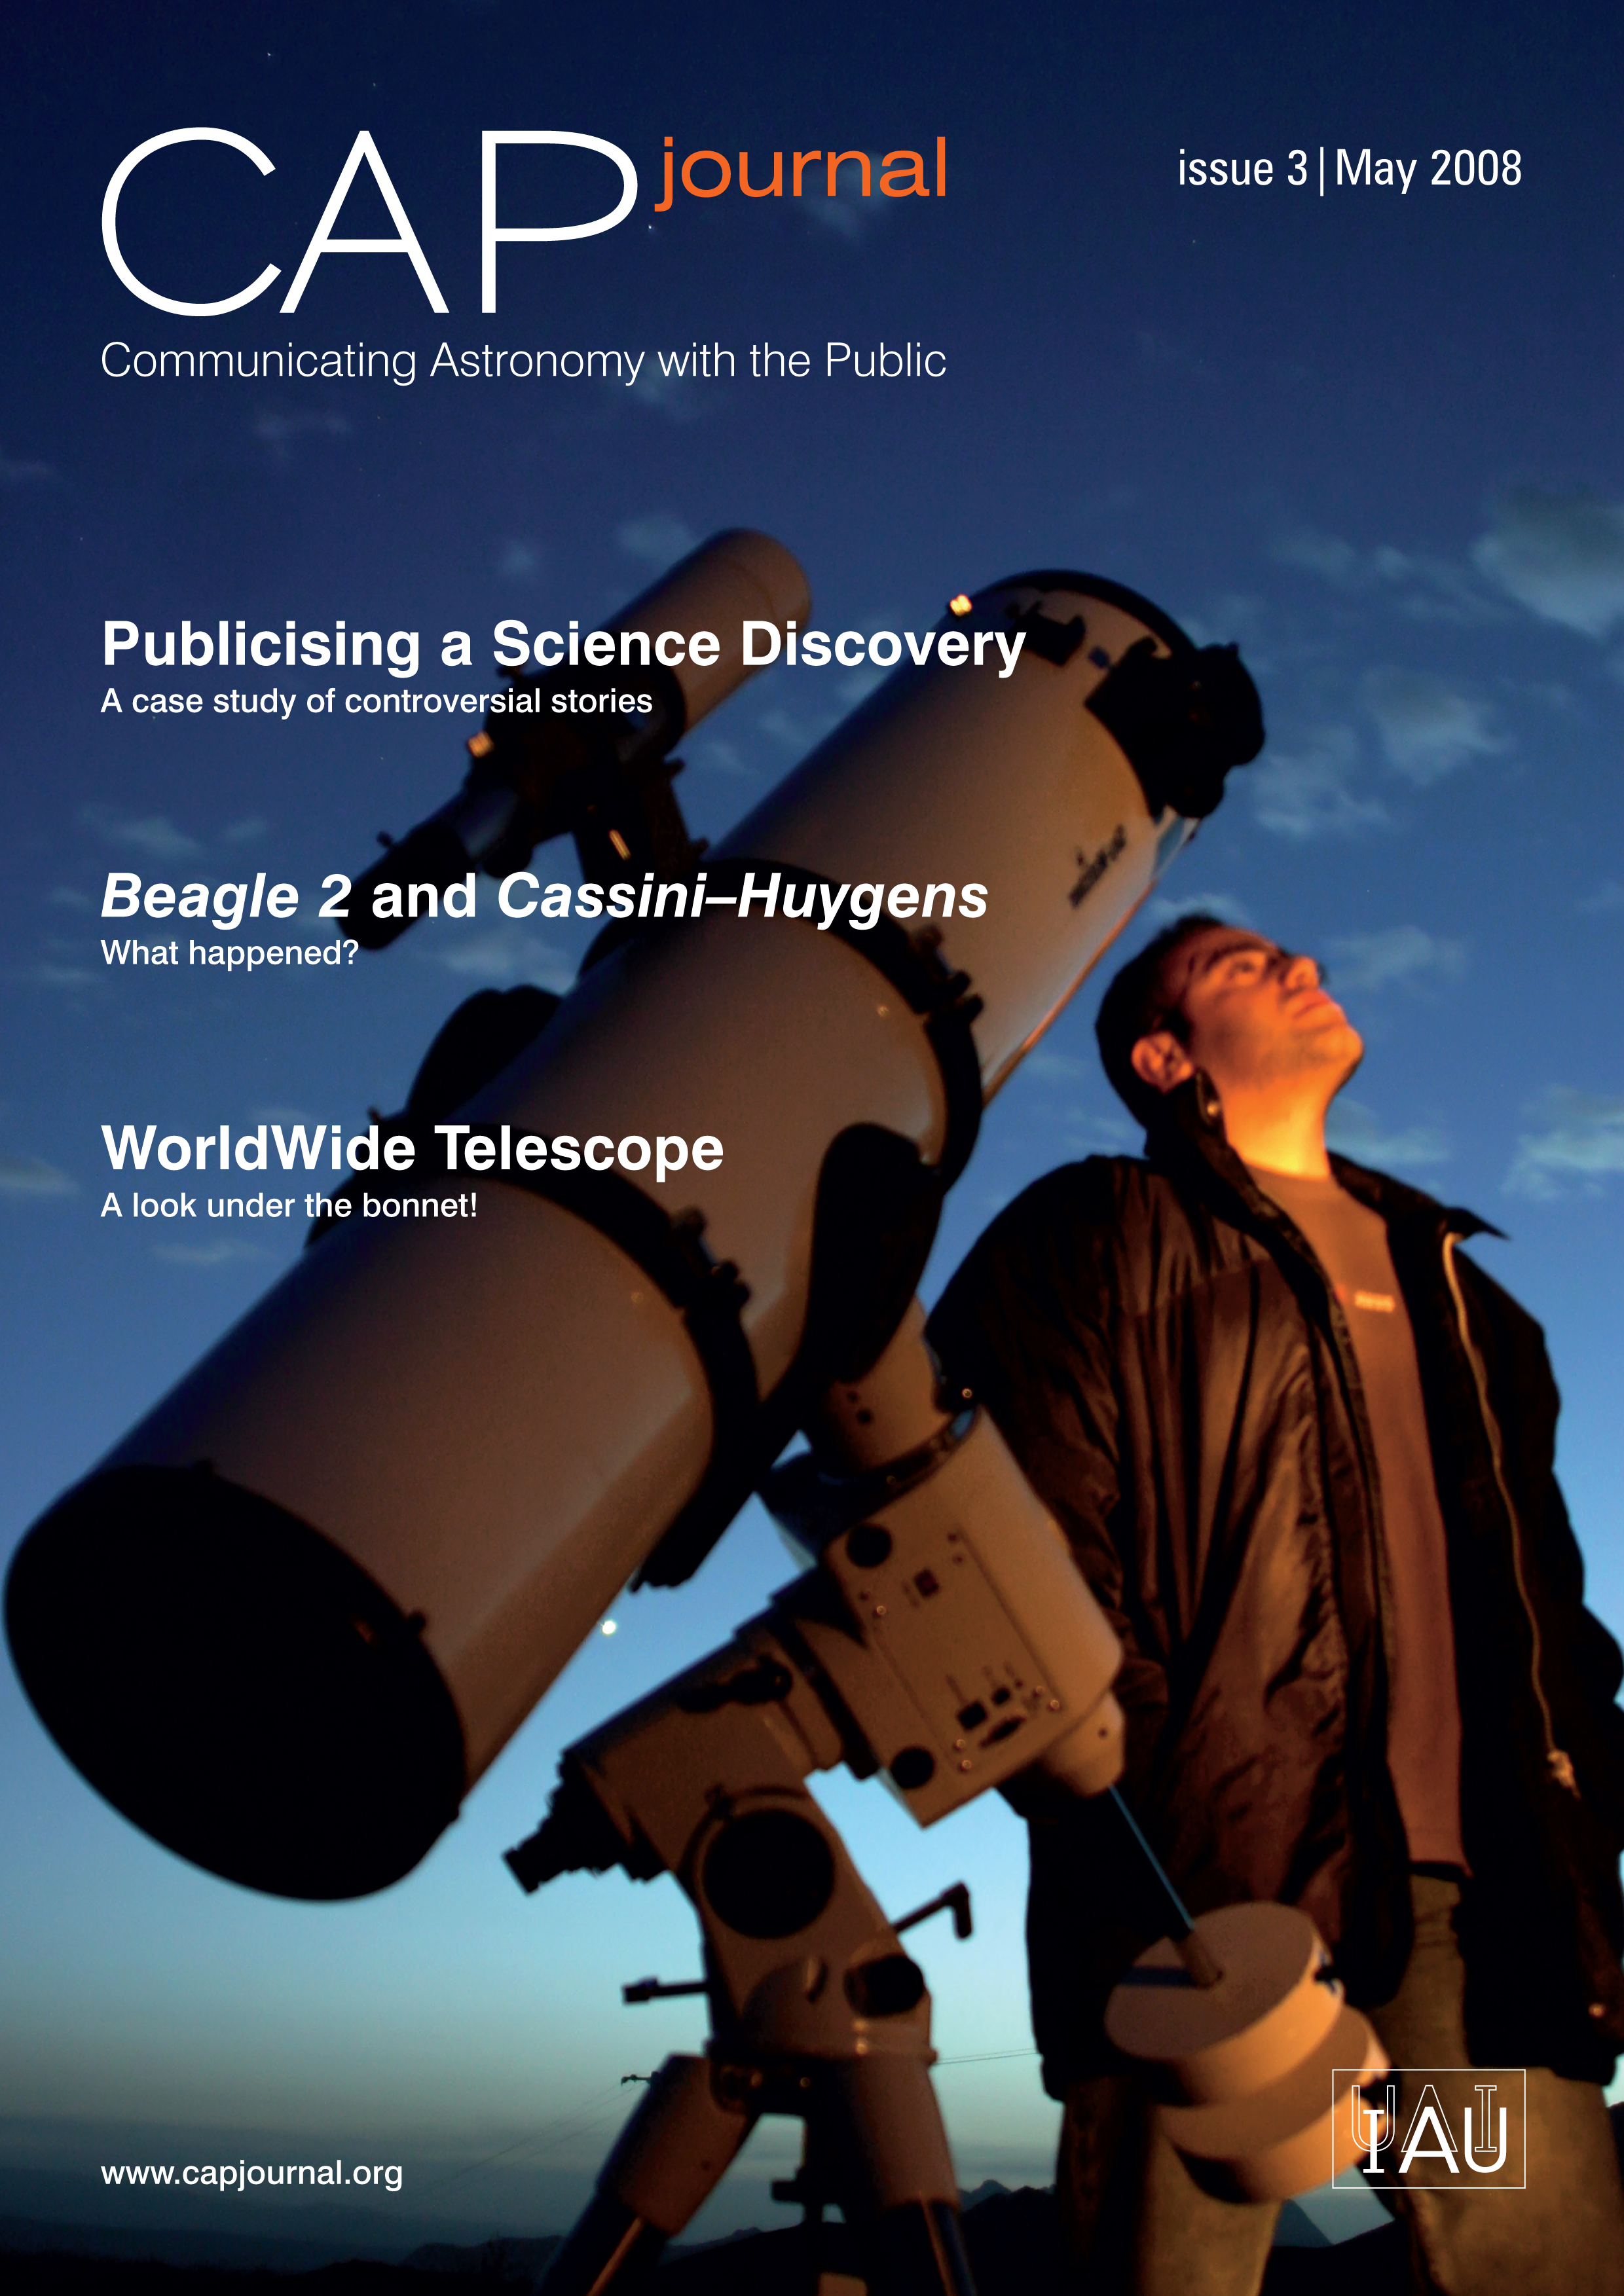

The Communicating Astronomy with the Public Journal #3 is out!

In this edition the contributions cover the full spectrum of astronomy communication from forefront technology to the fine art of communicating controversy. Three of the topics discussed in this issue deal with communicating contentious topics: the cases of the meteorite ALH 84001, the TMR-C1 "protoplanet" and the UK spacecraft Beagle 2 featured prominently in the media coverage of astronomy in 1996, 1998 and 2003 respectively. Two great articles examine the backstage drama and the media coverage of these remarkable stories thoroughly. There are many lessons to be learnt from these case studies.

On the CAPj's website, www.capjournal.org, you will find the current issue in PDF format, a job bank, submission guidelines and back issues.

Credit: NASA & ESA